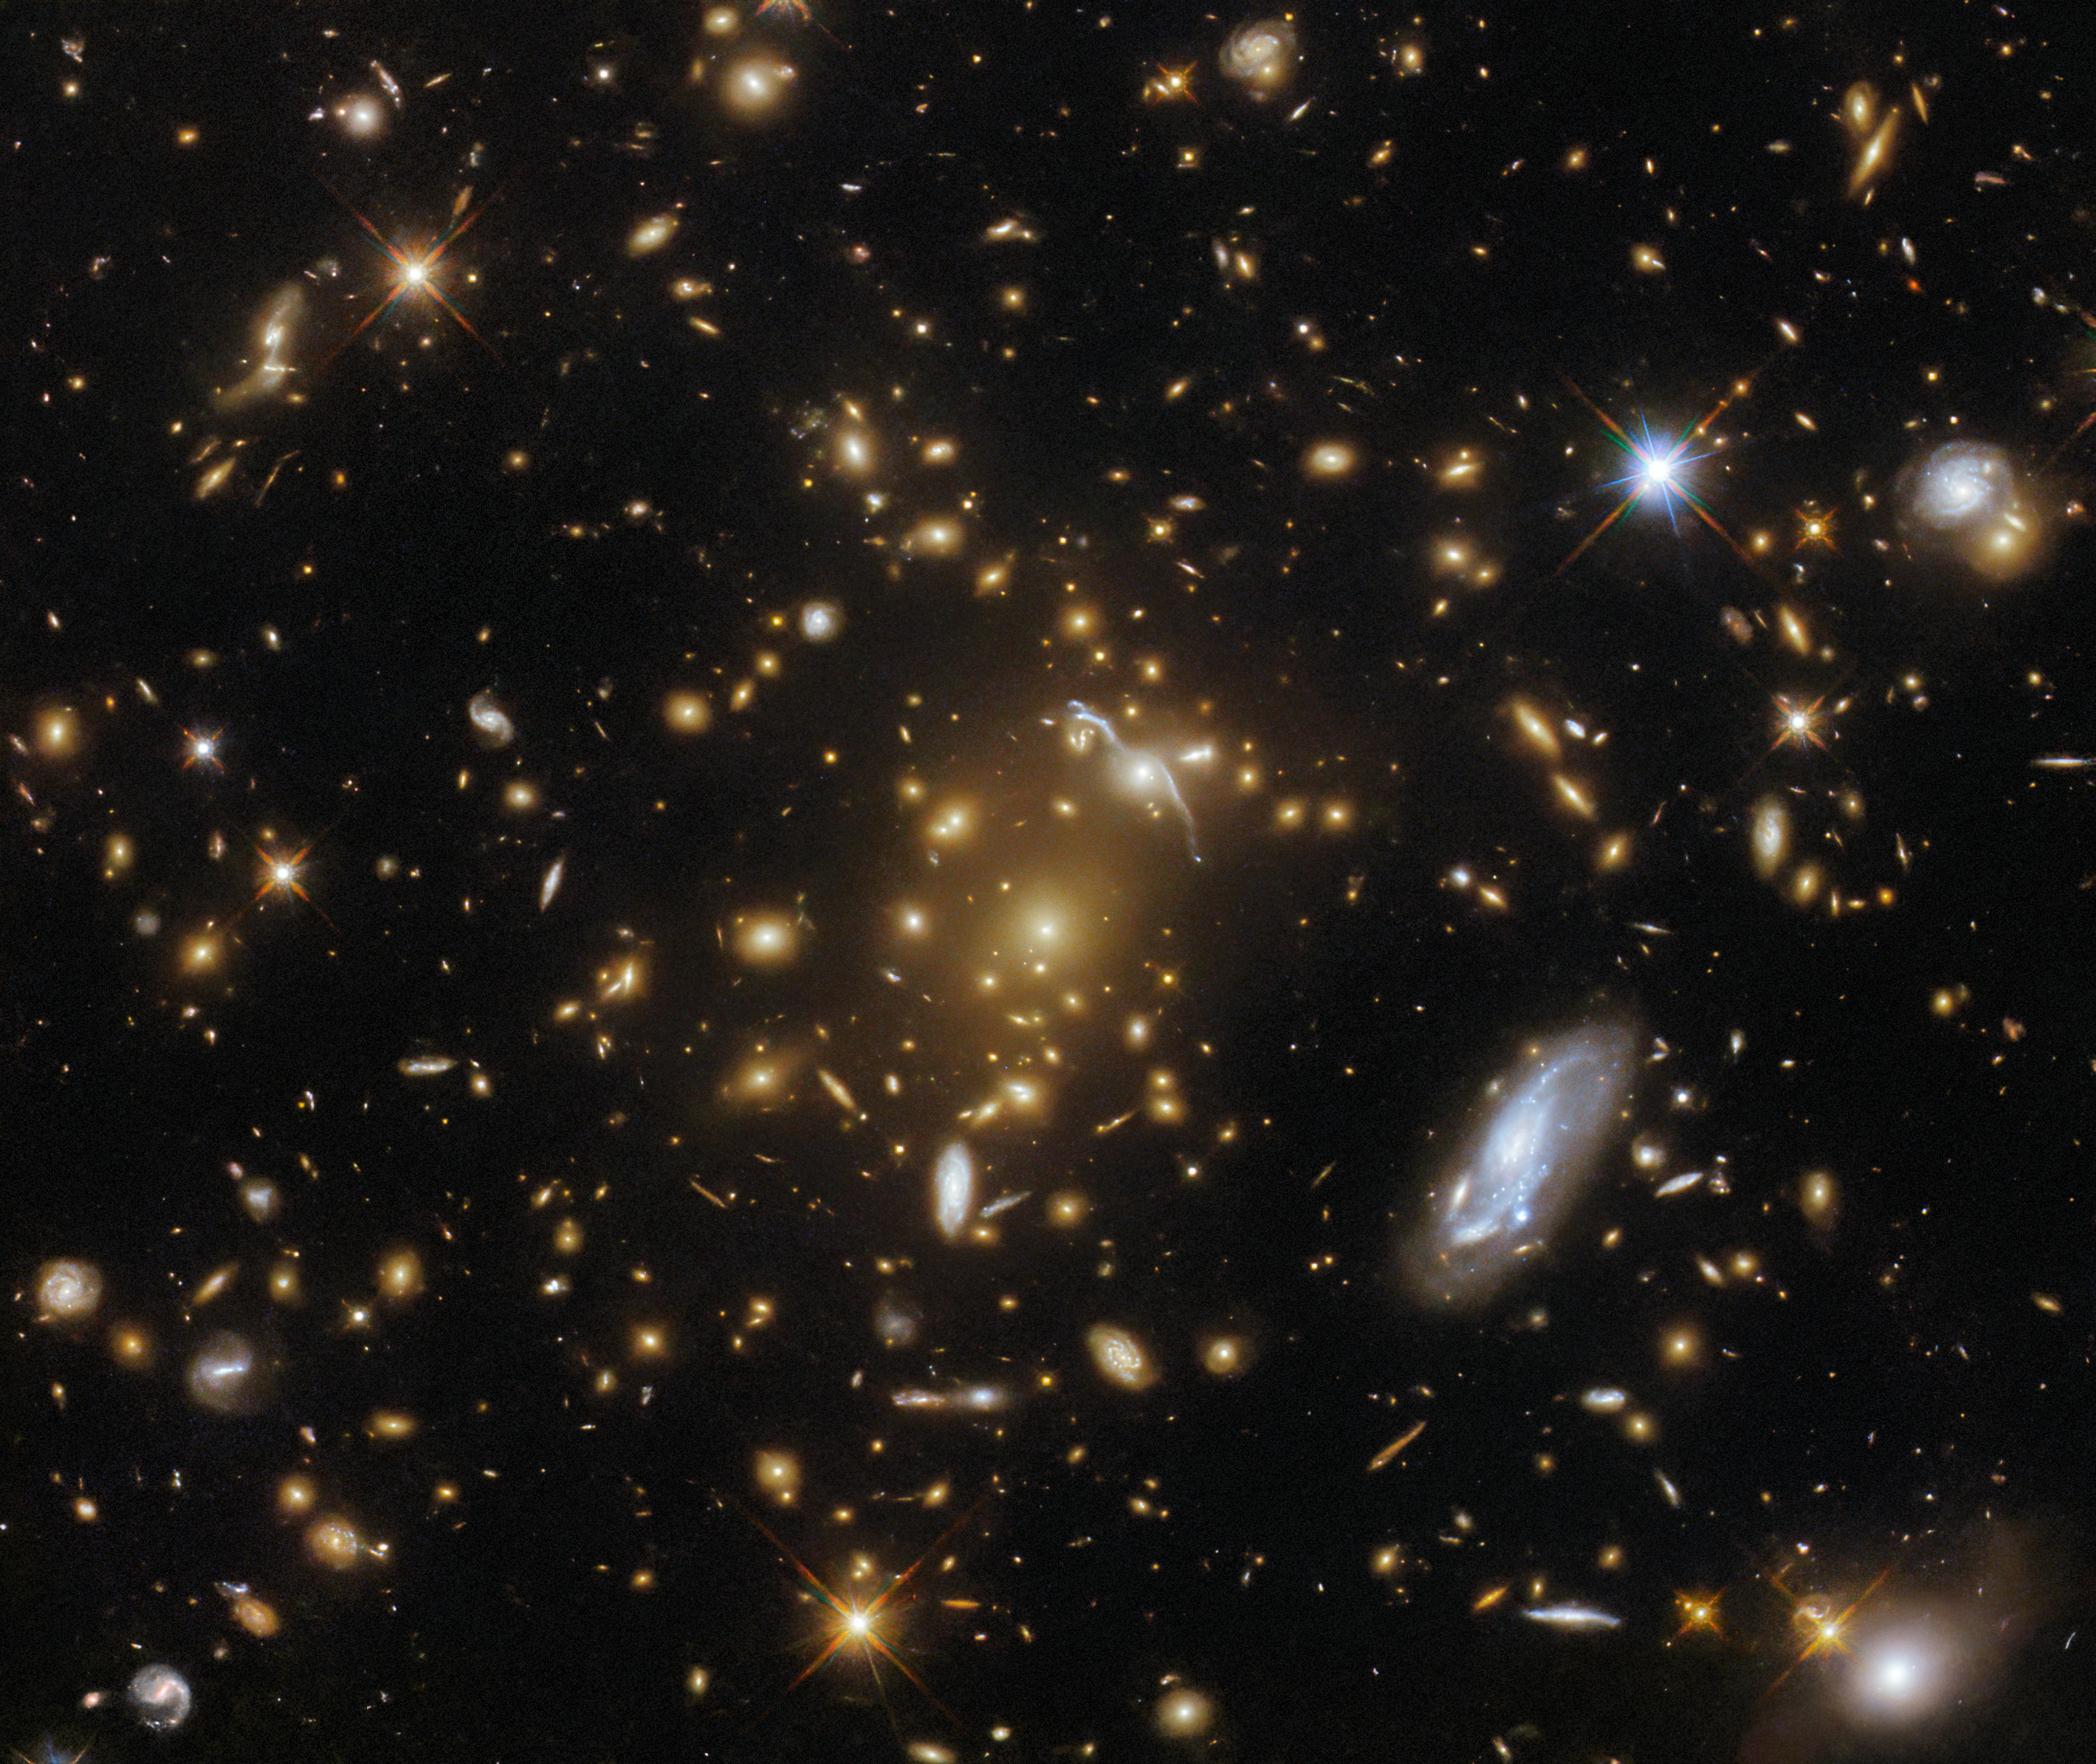

Cosmic leviathan

A vast galaxy cluster lurks in the centre of this image from the NASA/ESA Hubble Space Telescope. Like a submerged sea monster causing waves on the surface, this cosmic leviathan can be identified by the distortions in spacetime around it. The mass of the cluster has caused the images of background galaxies to be gravitationally lensed; the galaxy cluster has caused a sufficient curvature of spacetime to bend the path of light and cause background galaxies to appear distorted into streaks and arcs of light. A host of other galaxies can be seen surrounding the cluster, and a handful of foreground stars with tell-tale diffraction spikes are scattered throughout the image.

This particular galaxy cluster is called eMACS J1823.1+7822, and lies almost nine billion light-years away in the constellation Draco. It is one of five exceptionally massive galaxy clusters explored by Hubble in the hopes of measuring the strengths of these gravitational lenses and providing insights into the distribution of dark matter in galaxy clusters. Strong gravitational lenses like eMACS J1823.1+7822 can help astronomers study distant galaxies by acting as vast natural telescopes which magnify objects that would otherwise be too faint or distant to resolve.

This multiwavelength image layers data from eight different filters and two different instruments: Hubble’s Advanced Camera for Surveys and Wide Field Camera 3. Both instruments have the ability to view astronomical objects in just a small slice of the electromagnetic spectrum using filters, which allow astronomers to image objects at precisely selected wavelengths. The combination of observations at different wavelengths lets astronomers develop a more complete picture of the structure, composition and behaviour of an object than visible light alone would reveal.

Credit: ESA/Hubble & NASA, H. Ebeling